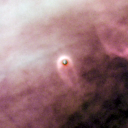

141-520

One of 42 new proplyds discovered in the Orion Nebula, 141-520 is one of the bright proplyds that lies relatively close to the nebula’s brightest star, Theta 1 Orionis C. Resembling a tiny jellyfish, this proplyd is surrounded by a shock wave that is caused by stellar wind from the massive Theta 1 Orionis C interacting with gas in the nebula.

Credit: NASA/ESA and L. Ricci (ESO)